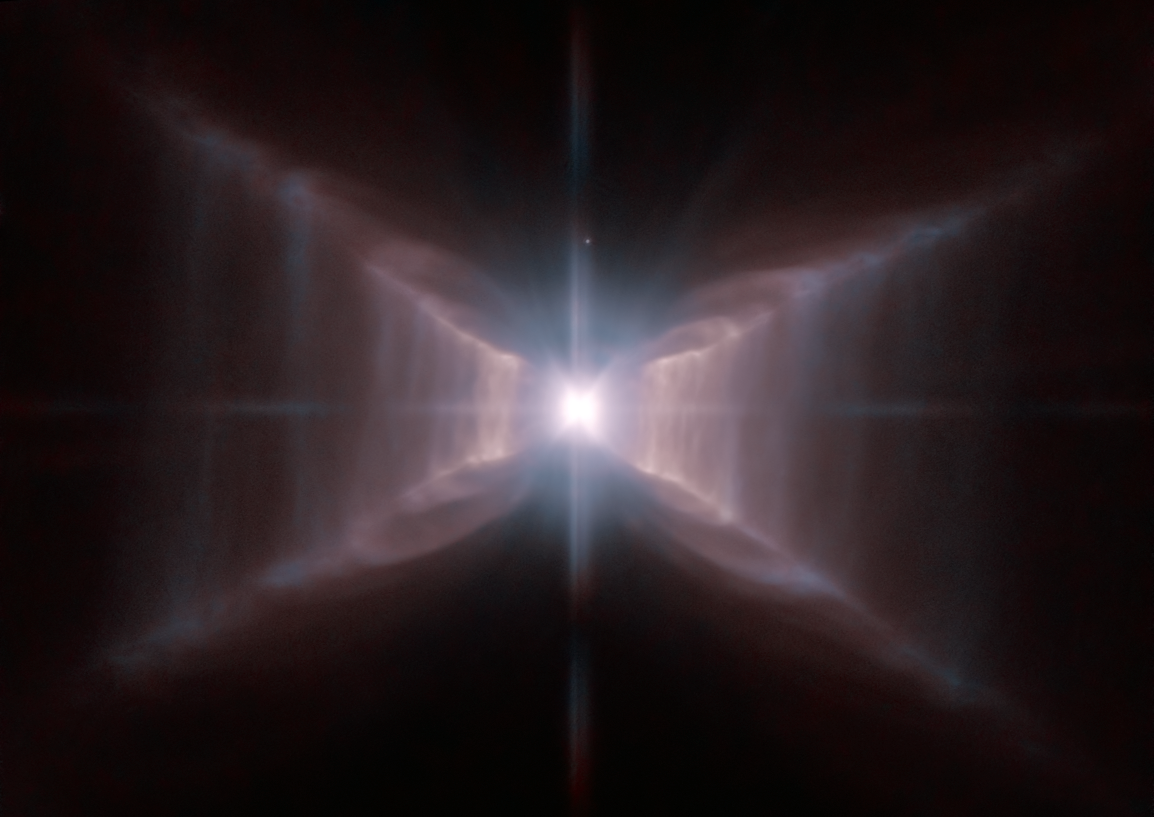

The unique Red Rectangle: sharper than ever before

The star HD 44179 is surrounded by an extraordinary structure known as the Red Rectangle. It acquired its moniker because of its shape and its apparent colour when seen in early images from Earth. This strikingly detailed new Hubble image reveals how, when seen from space, the nebula, rather than being rectangular, is shaped like an X with additional complex structures of spaced lines of glowing gas, a little like the rungs of a ladder. The star at the centre is similar to the Sun, but at the end of its lifetime, pumping out gas and other material to make the nebula, and giving it the distinctive shape. It also appears that the star is a close binary that is surrounded by a dense torus of dust — both of which may help to explain the very curious shape. Precisely how the central engine of this remarkable and unique object spun the gossamer threads of nebulosity remains mysterious. It is likely that precessing jets of material played a role.

The Red Rectangle is an unusual example of what is known as a proto-planetary nebula. These are old stars, on their way to becoming planetary nebulae. Once the expulsion of mass is complete a very hot white dwarf star will remain and its brilliant ultraviolet radiation will cause the surrounding gas to glow. The Red Rectangle is found about 2 300 light-years away in the constellation Monoceros (the Unicorn).

The High Resolution Channel of the NASA/ESA Hubble Space Telescope’s Advanced Camera for Surveys captured this view of HD 44179 and the surrounding Red Rectangle nebula — the sharpest view so far. Red light from glowing Hydrogen was captured through the F658N filter and coloured red. Orange-red light over a wider range of wavelengths through a F625W filter was coloured blue.

The field of view is about 25 by 20 arcseconds.

Credit: ESA/Hubble and NASA